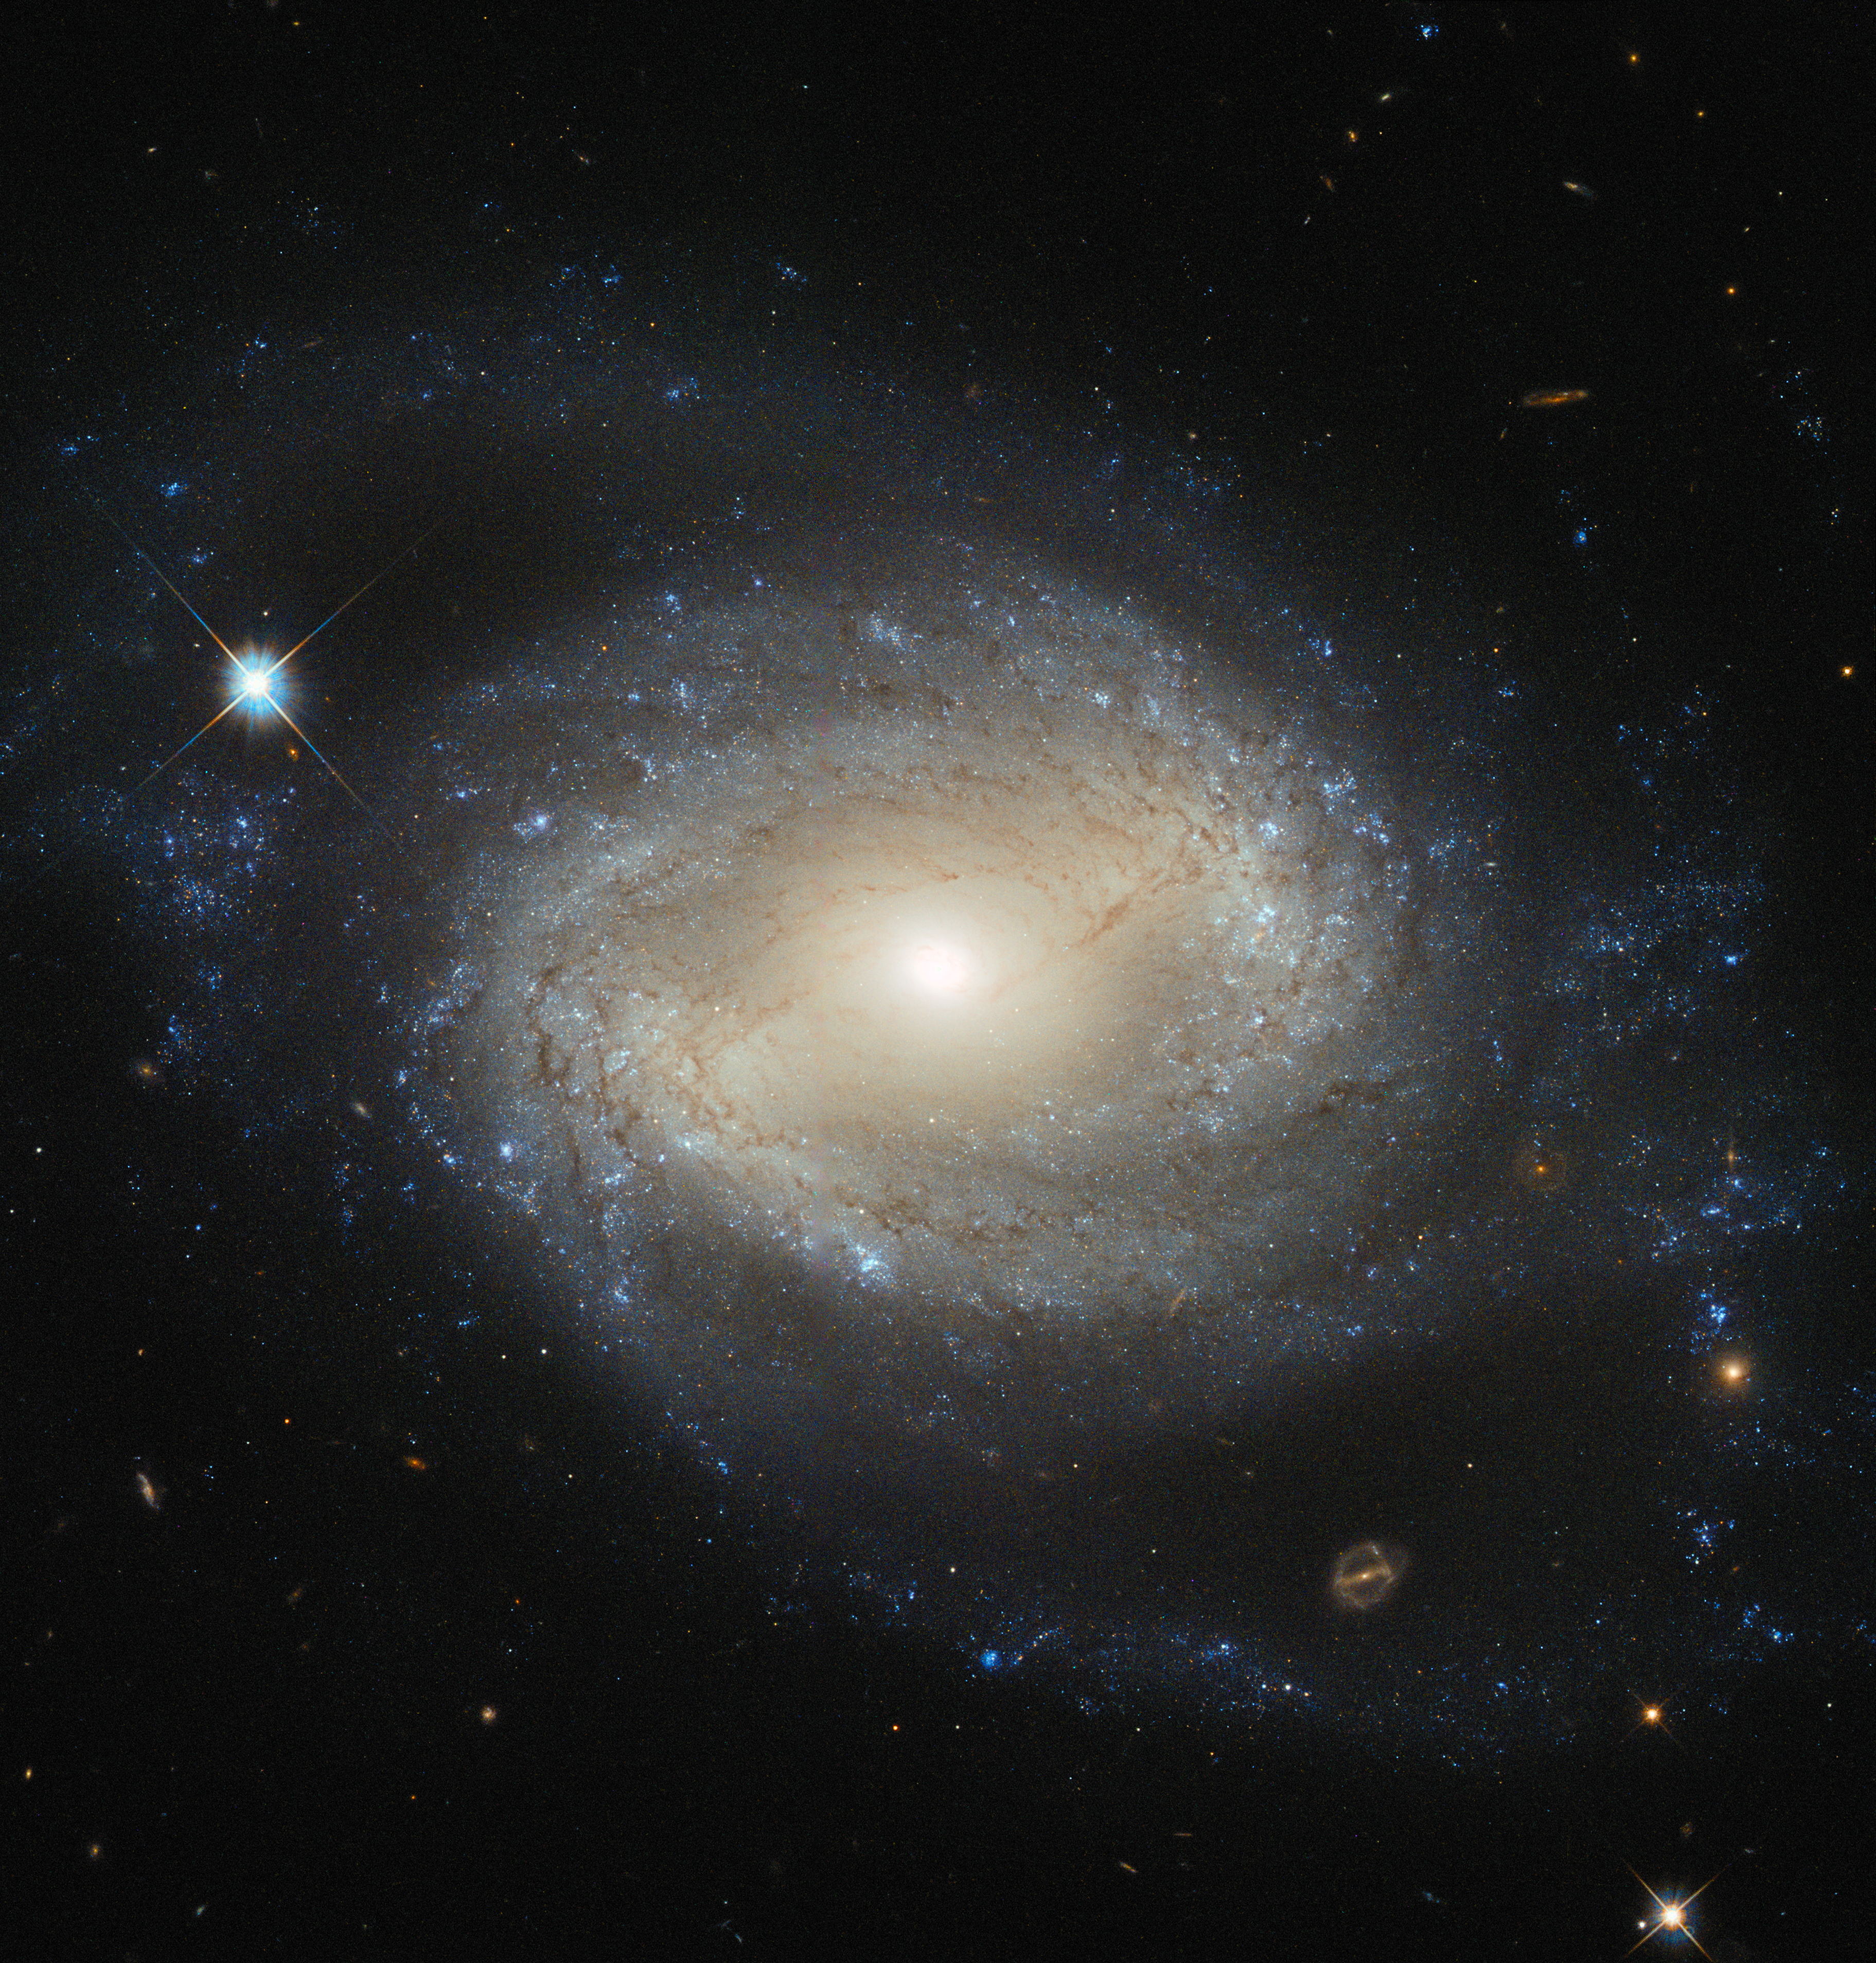

Elegant spiral hides a hungry monster

NGC 4639 is a beautiful example of a type of galaxy known as a barred spiral. It lies over 70 million light-years away in the constellation of Virgo and is one of about 1500 galaxies that make up the Virgo Cluster.

In this image, taken by the NASA/ESA Hubble Space Telescope, one can clearly see the bar running through the bright, round core of the galaxy. Bars are found in around two thirds of spiral galaxies, and are thought to be a natural phase in their evolution.

The galaxy’s spiral arms are sprinkled with bright regions of active star formation. Each of these tiny jewels is actually several hundred light-years across and contains hundreds or thousands of newly formed stars. But NGC 4639 also conceals a dark secret in its core — a massive black hole that is consuming the surrounding gas.

This is known as an active galactic nucleus (AGN), and is revealed by characteristic features in the spectrum of light from the galaxy and by X-rays produced close to the black hole as the hot gas plunges towards it.

Most galaxies are thought to contain a black hole at the centre. NGC 4639 is in fact a very weak example of an AGN, demonstrating that AGNs exist over a large range of activity, from galaxies like NGC 4639 to distant quasars, where the parent galaxy is almost completely dominated by the emissions from the AGN.

Credit: ESA/Hubble & NASA